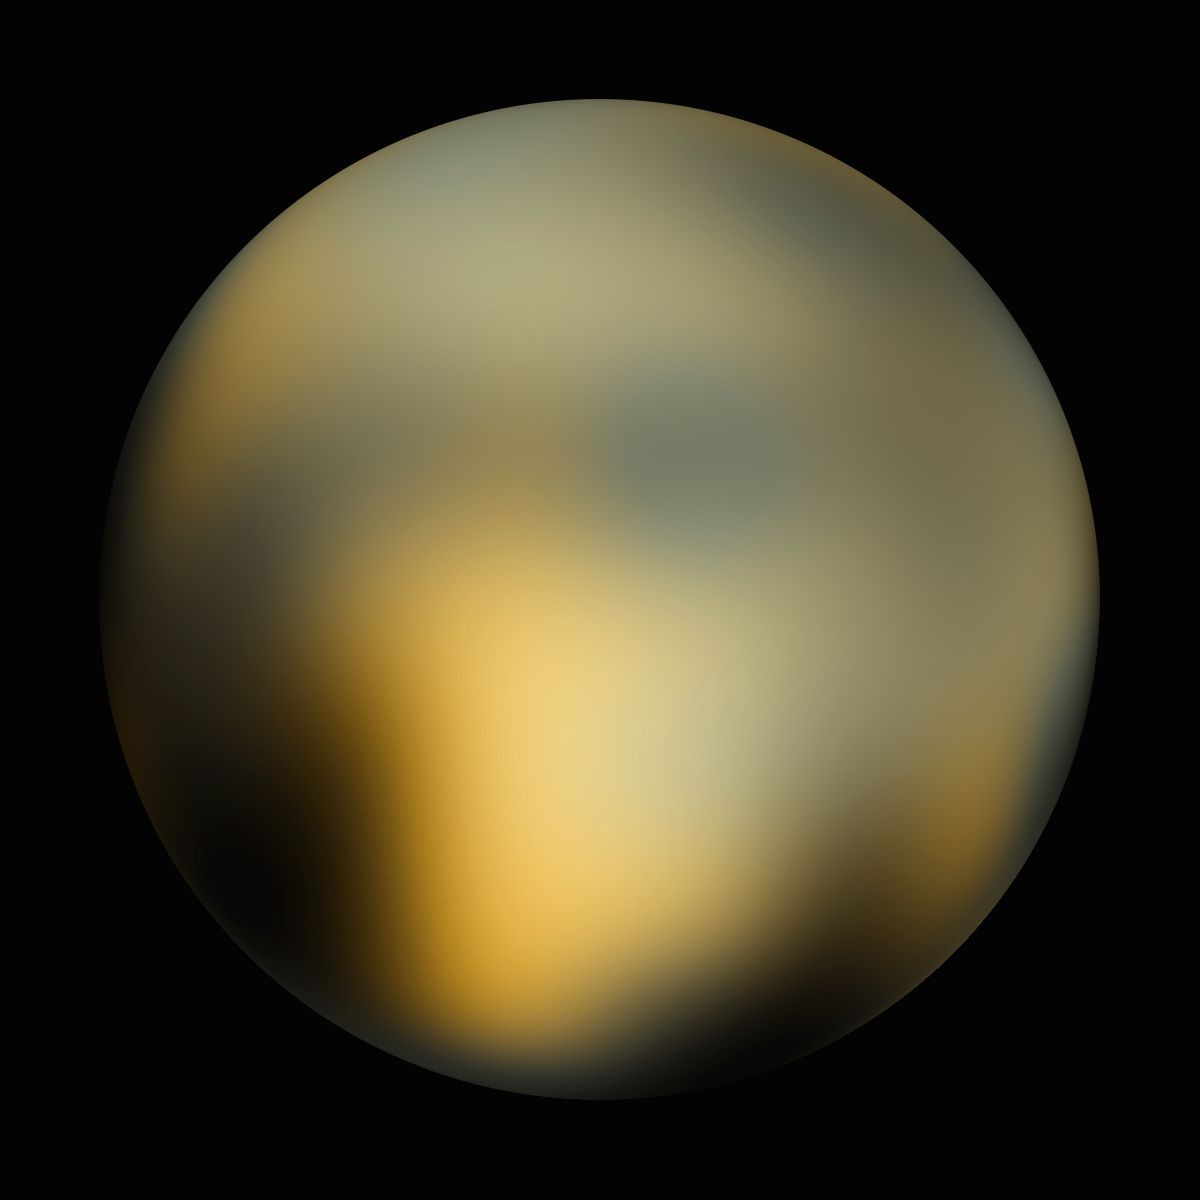

Pluto - 180° longitude

Pluto - 180° longitude.

Credit: NASA, ESA and M. Buie (Southwest Research Institute)